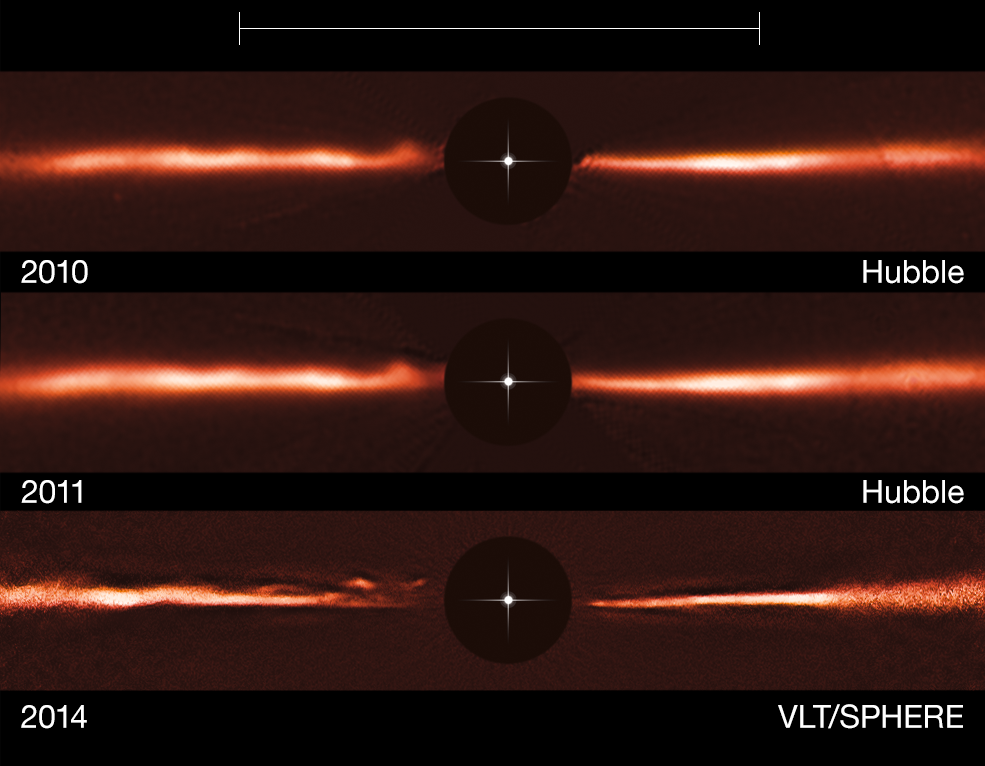

Hubble and VLT images of the disc around AU Microscopii

Using images from the NASA/ESA Hubble Space Telescope and ESO’s Very Large Telescope, astronomers have discovered fast-moving wave-like features in the dusty disc around the nearby star AU Microscopii. These odd structures are unlike anything ever observed, or even predicted, before now.

The top row shows a Hubble image of the AU Mic disc from 2010, the middle row Hubble from 2011 and the bottom row is an image taken with the SPHERE instrument, mounted on the Very Large Telescope, from 2014. The black central circles show where the brilliant light of the central star has been blocked off to reveal the much fainter disc, and the position of the star is indicated schematically.

The scale bar at the top of the picture indicates the diameter of the orbit of the planet Neptune in the Solar System (60 AU).

Note that the brightness of the outer parts of the disc has been artificially brightened to reveal the faint structure.

Credit: ESO, NASA & ESA